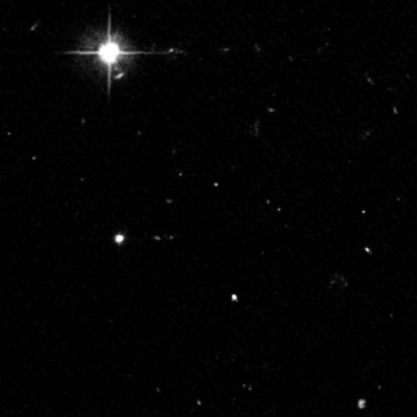

Farthest, Faintest Solar System Objects Found Beyond Neptune

Astronomers using NASA's Hubble Space Telescope have discovered three of the faintest and smallest objects ever detected beyond Neptune. Each object is a lump of ice and rock — roughly the size of Philadelphia.

Credit: NASA/ESA, G. Bernstein and D. Trilling (University of Pennsylvania)